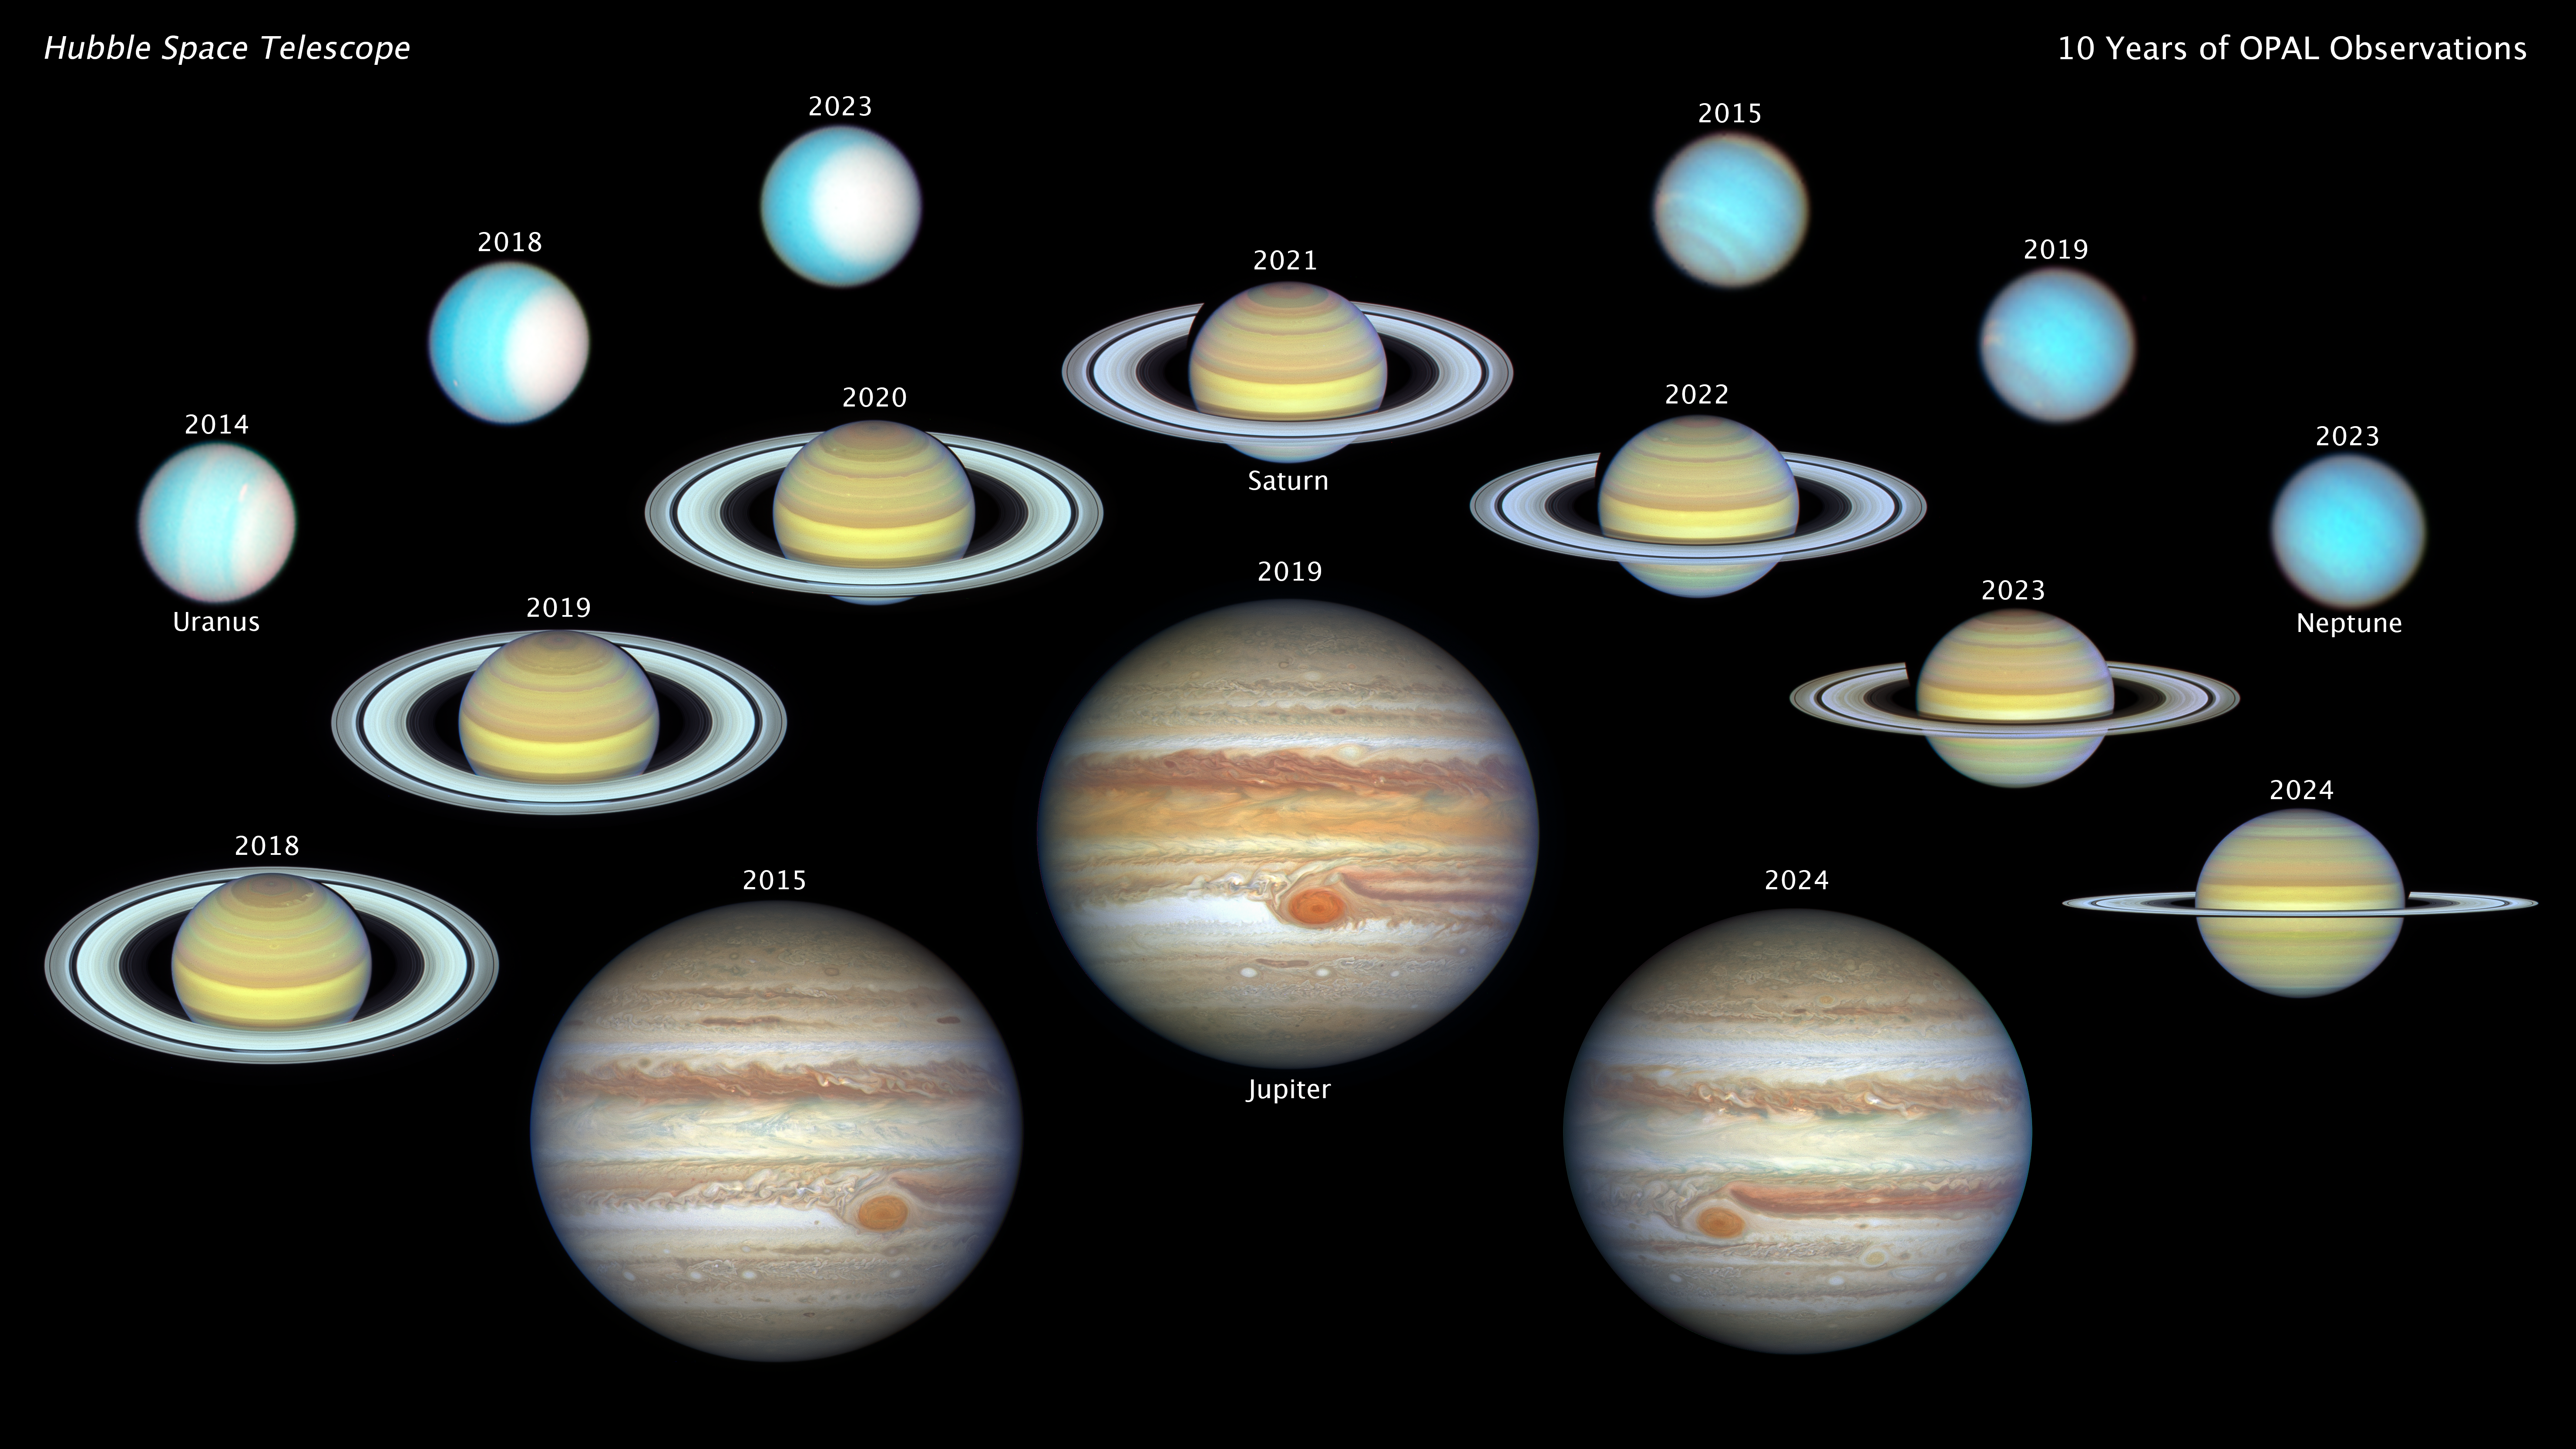

Hubble celebrates decade of tracking outer planets

This is a montage of NASA/ESA Hubble Space Telescope views of our solar system's four giant outer planets: Jupiter, Saturn, Uranus, and Neptune, each shown in enhanced color. The images were taken over nearly 10 years, from 2014 to 2024. This long baseline allows astronomers to track seasonal changes in each planet's turbulent atmosphere, with the sharpness of the NASA planetary flyby probes of the 1980s. These images were taken under a program called OPAL (Outer Planet Atmospheres Legacy).

From upper-left toward center, the hazy white polar cap on the three teal-colored Uranus images appears more face-on as the planet approaches northern summer.

From center-right to far-center right, three images of the blue planet Neptune show the coming and going of clouds as the Sun's radiation level changes. Several of Neptune's mysterious dark spots have come and gone sequentially over OPAL's decade of observations.

Seven views of yellow-brown Saturn stretch across the center of the mosaic in a triangle—one for each year of OPAL observations—showing the tilt of the angle of the ring plane relative to the view from Earth. Approximately every 15 years the relatively paper-thin rings (about one mile thick) can be seen edge-on. In 2018 they were near their maximum tilt toward Earth. Colorful changes in Saturn's bands of clouds can be followed as the weather changes.

At bottom center, three images of Jupiter spanning nearly a decade, form a triangle. There are notable changes in Jupiter's banded cloud structure of zones and belts. OPAL measured shrinking of the legendary Great Red Spot, while its rotation period speeds up.

Credit: NASA, ESA, A. Simon (NASA-GSFC), M. H. Wong (UC Berkeley), J. DePasquale (STScI)